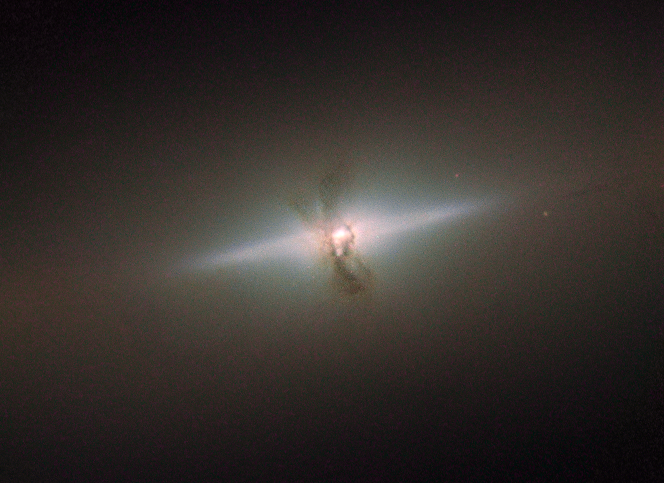

Elegance conceals an eventful past

The elegant simplicity of NGC 4111, seen here in this image from the NASA/ESA Hubble Space Telescope, hides a more violent history than you might think. NGC 4111 is a lenticular, or lens-shaped, galaxy, lying about 50 million light-years from us in the constellation of Canes Venatici (The Hunting Dogs).

Lenticular galaxies are an intermediate type of galaxy between an elliptical and a spiral. They host aged stars like ellipticals and have a disk like a spiral. However, that’s where the similarities end: they differ from ellipticals because they have a bulge and a thin disk, but are different from spirals because lenticular discs contain very little gas and dust, and do not feature the many-armed structure that is characteristic of spiral galaxies. In this image we see the disc of NGC 4111 edge-on, so it appears as a thin sliver of light on the sky.

At first sight, NGC 4111 looks like a fairly uneventful galaxy, but there are unusual features that suggest it is not such a peaceful place. Running through its centre, at right angles to the thin disc, is a series of filaments, silhouetted against the bright core of the galaxy. These are made of dust, and astronomers think they are associated with a ring of material encircling the galaxy’s core. Since it is not aligned with the galaxy’s main disc, it is possible that this polar ring of gas and dust is actually the remains of a smaller galaxy that was swallowed up by NGC 4111 long ago.

Credit: ESA/Hubble & NASA Acknowledgement: Judy Schmidt